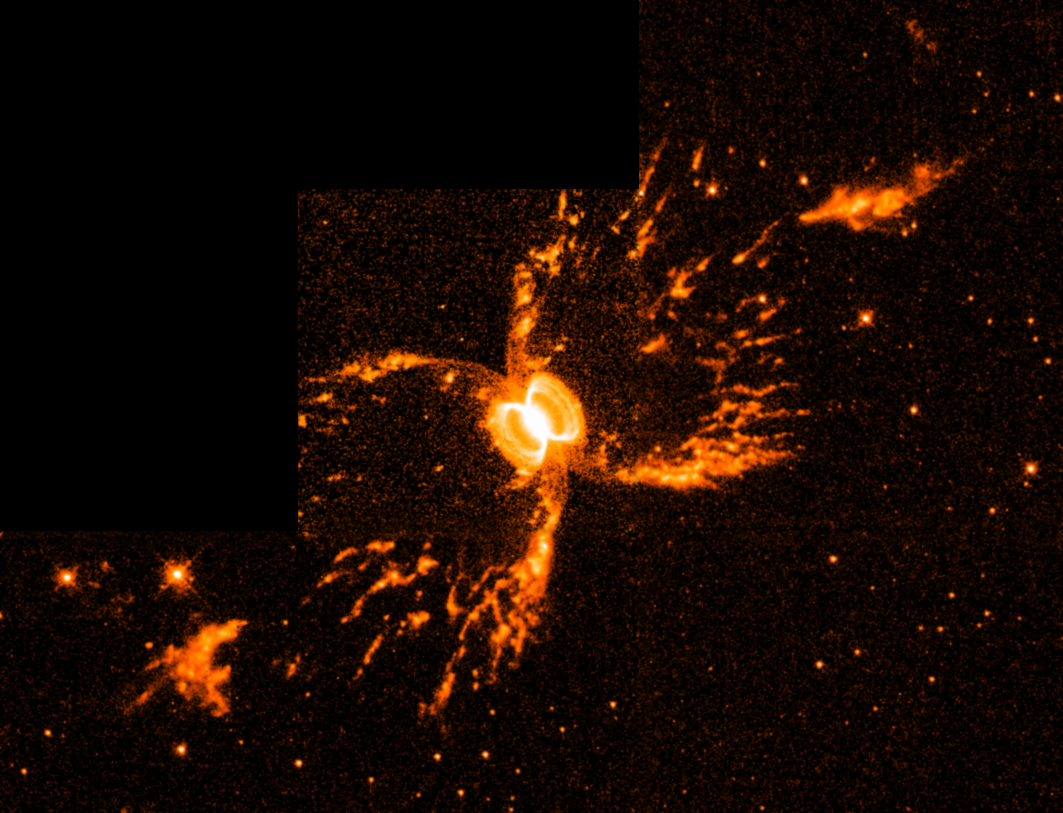

Southern Crab Nebula

A tempestuous relationship between an unlikely pair of stars may have created an oddly shaped, gaseous nebula that resembles an hourglass nestled within an hourglass.

The possible creators of these shapes cannot be seen at all in this Wide Field and Planetary Camera 2image. It's a pair of aging stars buried in the glow of the tiny, central nebula.

Credit: Romano Corradi, Instituto de Astrofisica de Canarias, Tenerife, Spain; Mario Livio, Space Telescope Science Institute, Baltimore, Md.; Ulisse Munari, Osservatorio Astronomico di Padova-Asiago, Italy; HugoSchwarz, Nordic Optical Telescope, Canarias, Spain; and NASA/ESA